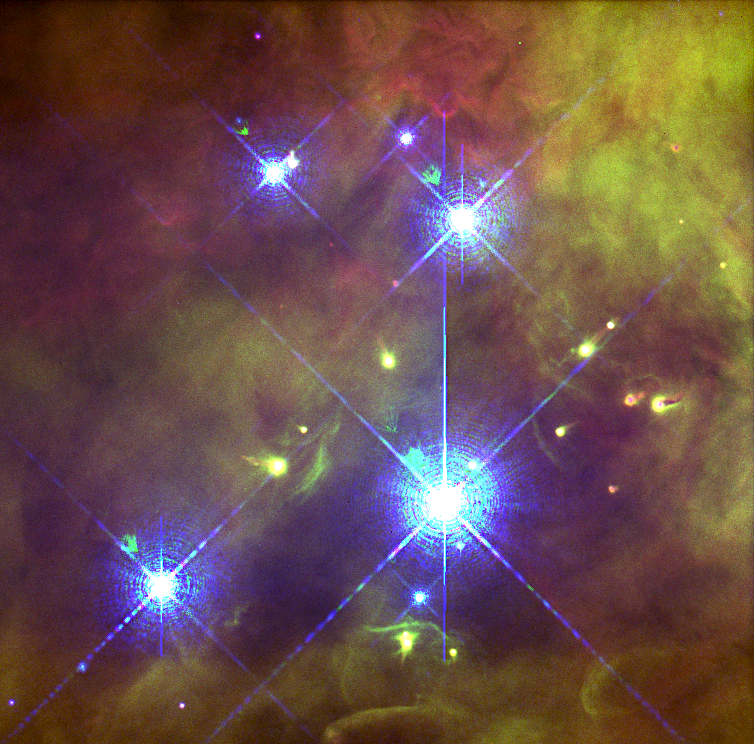

Trapezium, Orion Nebula

Like the Grand Canyon, the Orion nebula has a dramatic surface topography — of glowing gasses instead of rock — with peaks, valleys and walls. They are illuminated and heated by a torrent of energetic ultraviolet light from its four hottest and most massive stars, called the Trapezium, which are pictured here.

In addition to the Trapezium, this stellar cavern contains 700 hundred other young stars at various stages of formation. High-speed jets of hot gas spewed by some of the infant stars send supersonic shock waves tearing into the nebula at 100,000 miles per hour.

Credit: NASA, C.R. O'Dell and S.K. Wong (Rice University)